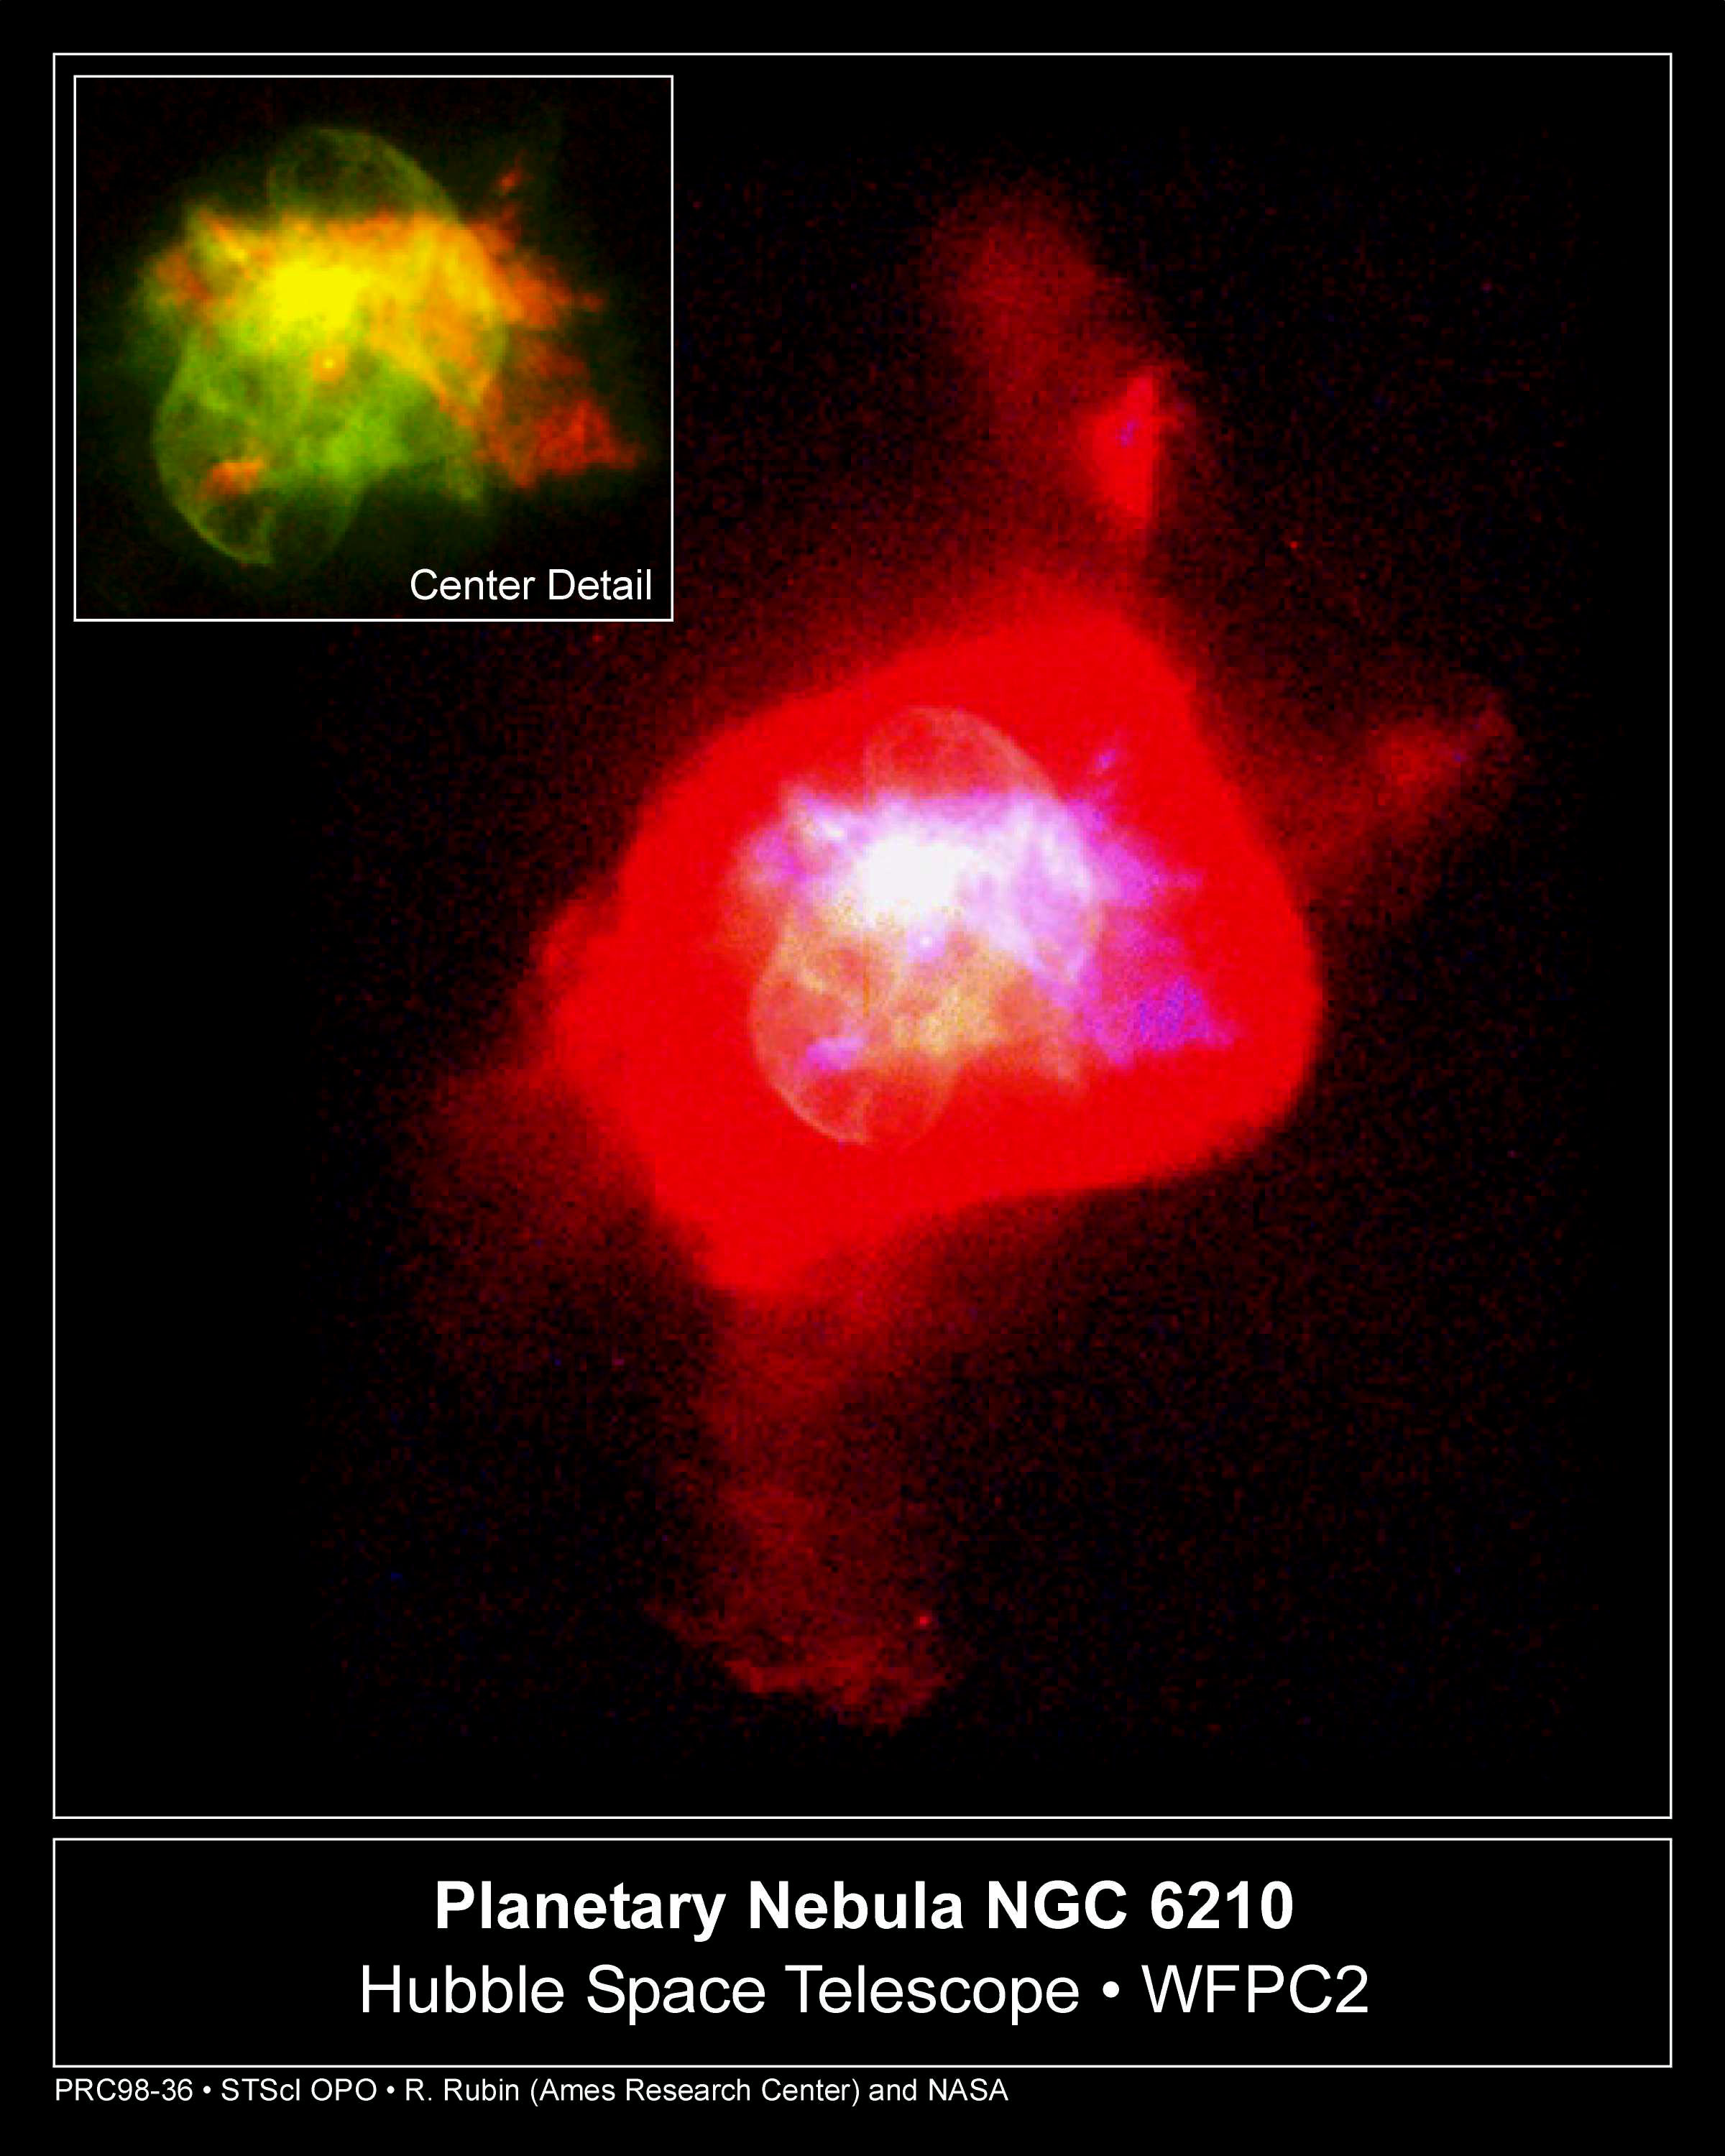

Planetary Nebula NGC 6210

The NASA/ESAHubble Space Telescope has shown us that the shrouds of gas surrounding dying, sunlike stars (called planetary nebulae) come in a variety of strange shapes, from an 'hourglass' to a 'butterfly' to a 'stingray.' With this image of NGC 6210, the Hubble telescope has added another bizarre form to the rogues’ gallery of planetary nebulae: a turtle swallowing a seashell. Giving this dying star such a weird name is less of a challenge than trying to figure out how dying stars create these unusual shapes.

Credit: Robert Rubin and Christopher Ortiz (NASA Ames Research Center), Patrick Harrington and Nancy Jo Lame (University of Maryland), Reginald Dufour (Rice University), and NASA/ESA